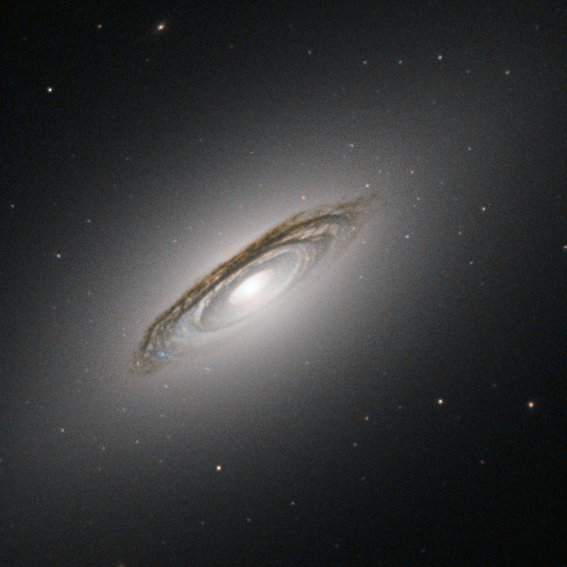

The third way of galaxies

The subject of this image is NGC 6861, a galaxy discovered in 1826 by the Scottish astronomer James Dunlop. Almost two centuries later we now know that NGC 6861 is the second brightest member of a group of at least a dozen galaxies called the Telescopium Group — otherwise known as the NGC 6868 Group — in the small constellation of Telescopium (The Telescope).

This NASA/ESA Hubble Space Telescope view shows some important details of NGC 6861. One of the most prominent features is the disc of dark bands circling the centre of the galaxy. These dust lanes are a result of large clouds of dust particles obscuring the light emitted by the stars behind them.

Dust lanes are very useful for working out whether we are seeing the galaxy disc edge-on, face-on or, as is the case for NGC 6861, somewhat in the middle. Dust lanes like these are typical of a spiral galaxy. The dust lanes are embedded in a white oval shape, which is made up of huge numbers of stars orbiting the centre of the galaxy. This oval is, rather puzzlingly, typical of an elliptical galaxy.

So which is it — spiral or elliptical? The answer is neither! NGC 6861 does not belong to either the spiral or the elliptical family of galaxies. It is a lenticular galaxy, a family which has features of both spirals and ellipticals.

The relationships between these three kinds of galaxies are not yet well understood. A lenticular galaxy could be a faded spiral that has run out of gas and lost its arms, or the result of two galaxies merging. Being part of a group increases the chances for galactic mergers, so this could be the case for NGC 6861.

A version of this image was entered into the Hubble’s Hidden Treasures image processing competition by contestant Josh Barrington.

Credit: ESA/Hubble & NASA Acknowledgement: J. Barrington